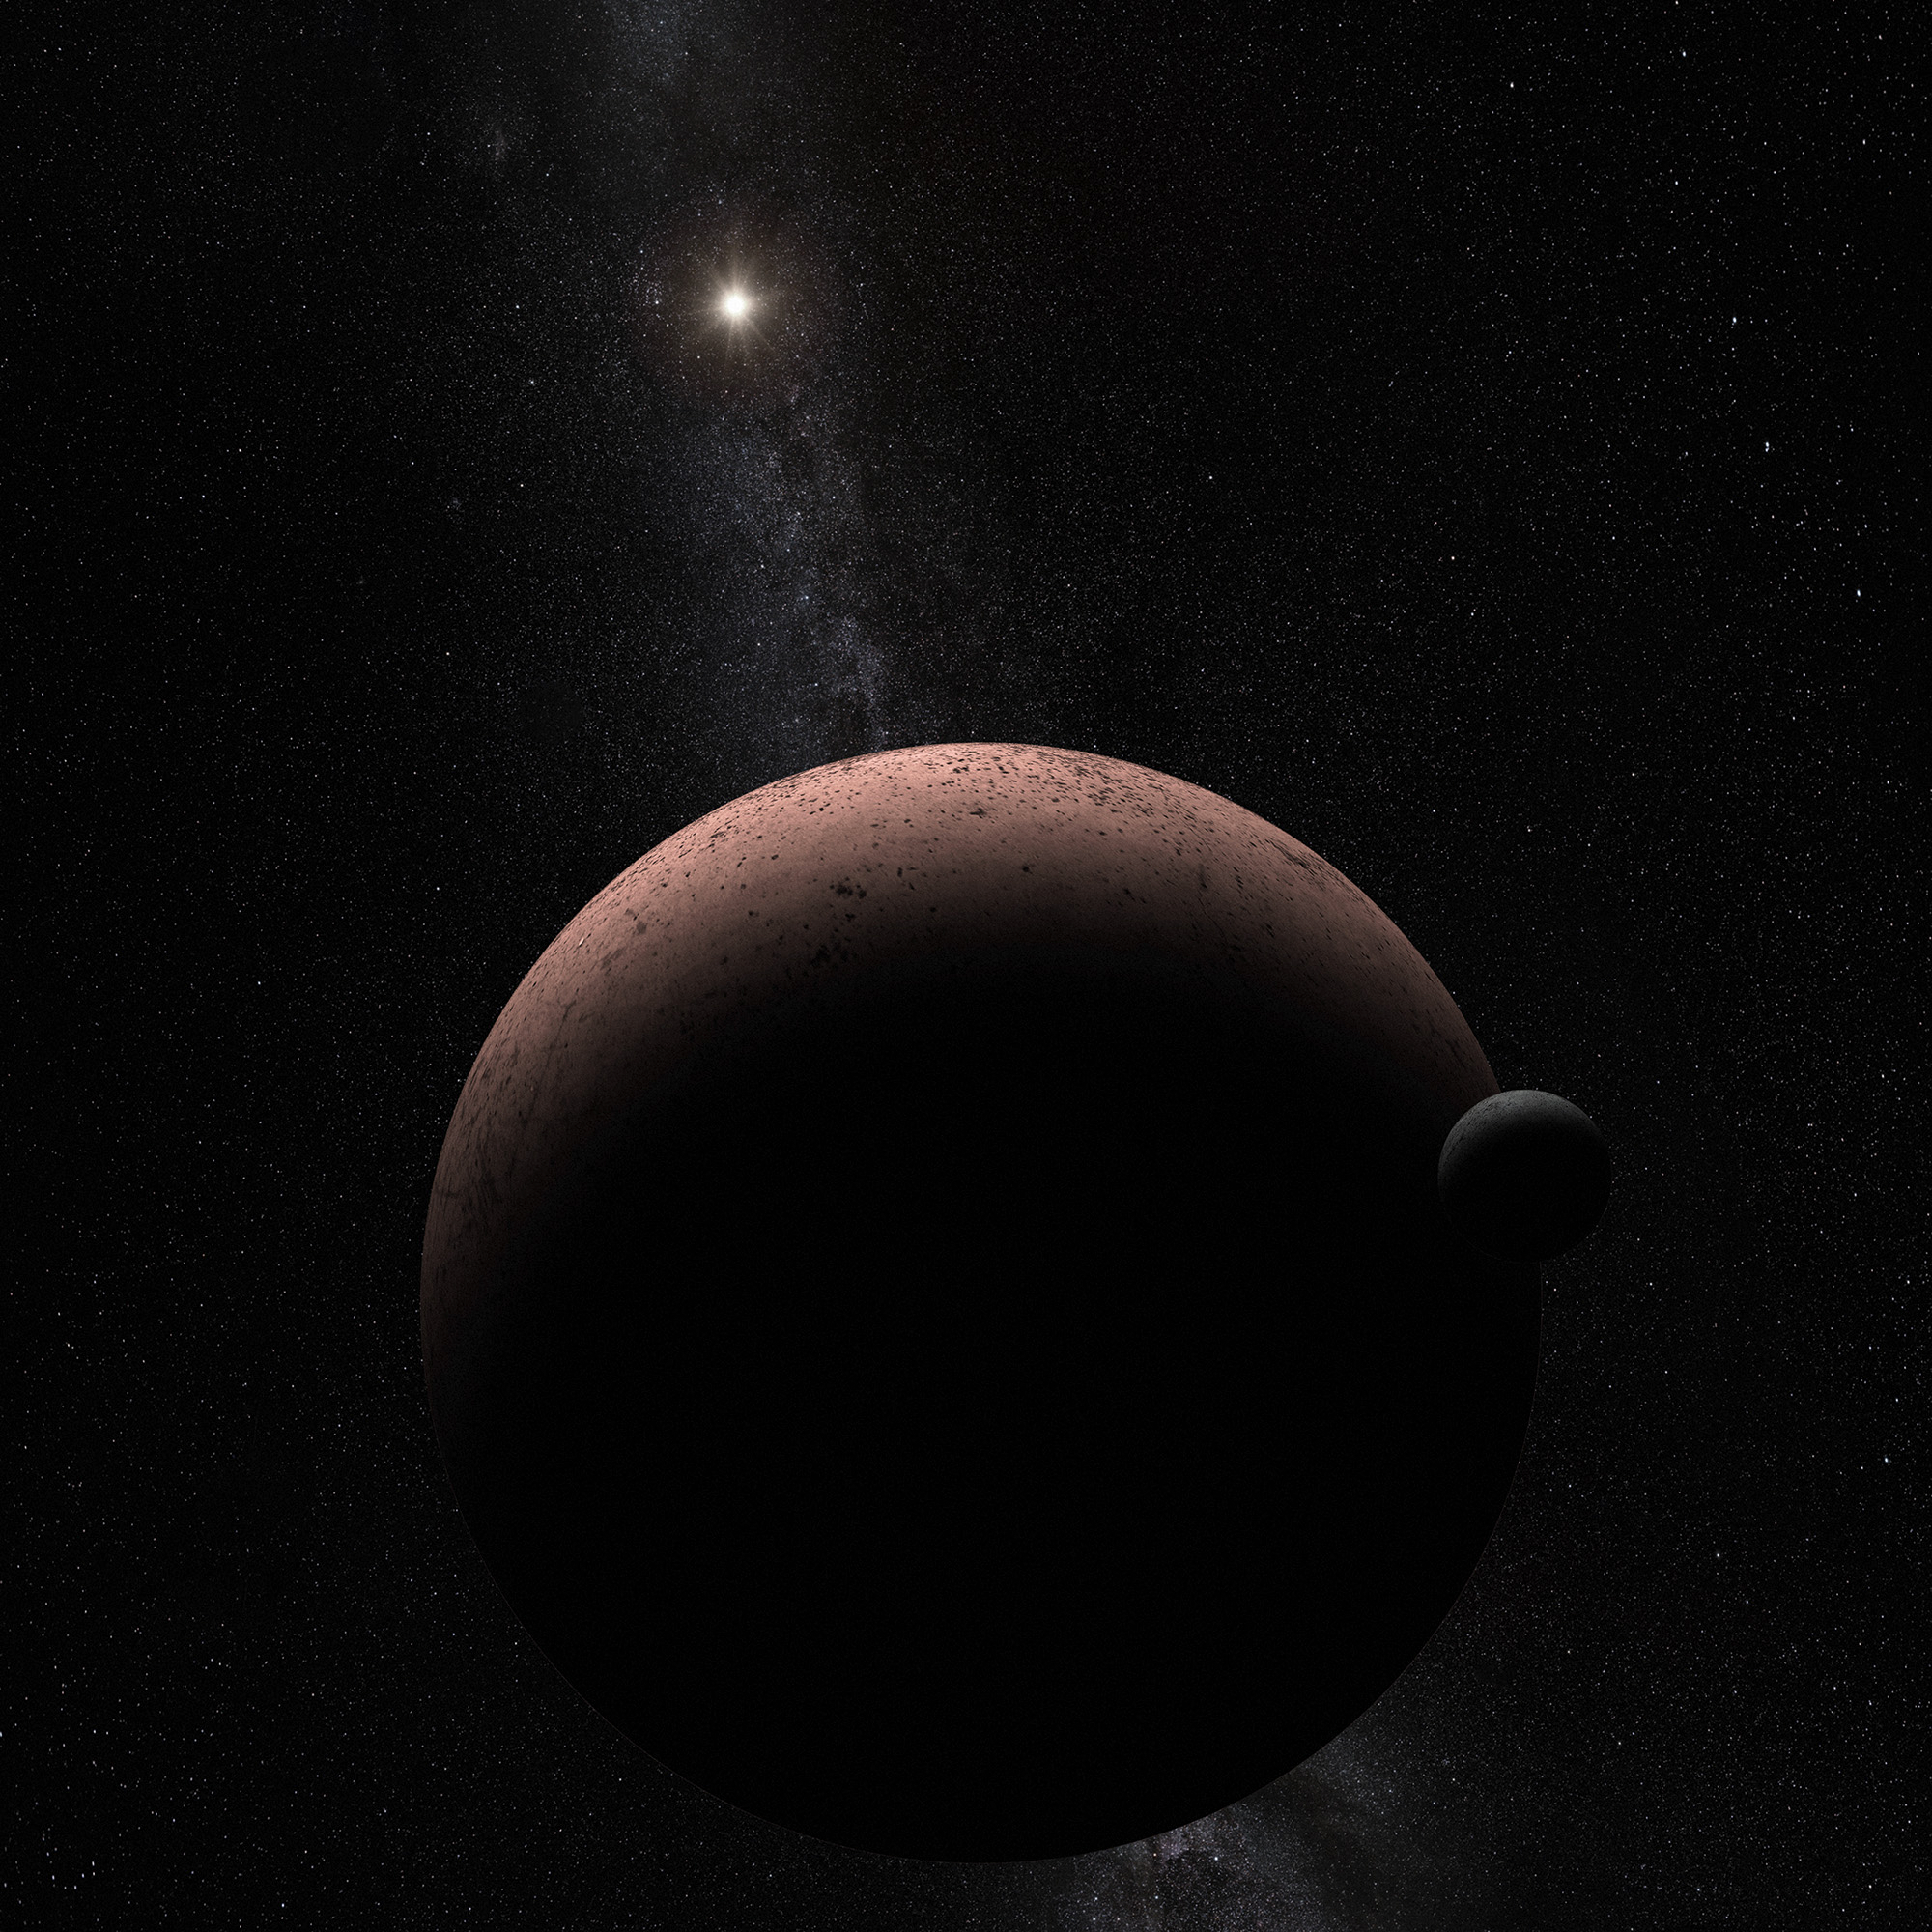

Makemake and Its Moon (Artist's Concept)

This artist's concept shows the distant dwarf planet Makemake and its newly discovered moon. Makemake and its moon, nicknamed MK 2, are more than 50 times farther away than Earth is from the Sun.

The pair resides in the Kuiper Belt, a vast reservoir of frozen material from the construction of our Solar System 4.5 billion years ago. Makemake is covered in bright frozen methane that is tinted red by the presence of complex organic material. Its moon is too small to retain ices as volatile as methane, even given the feeble heating by the very distant Sun, and likely has a much darker surface. MK 2 is orbiting 21,000 kilometres from the dwarf planet, and its estimated diameter is roughly 160 kilometres across. Makemake itself is 2200 kilometres across.

Credit: NASA, ESA, and A. Parker and M. Buie (Southwest Research Institute)